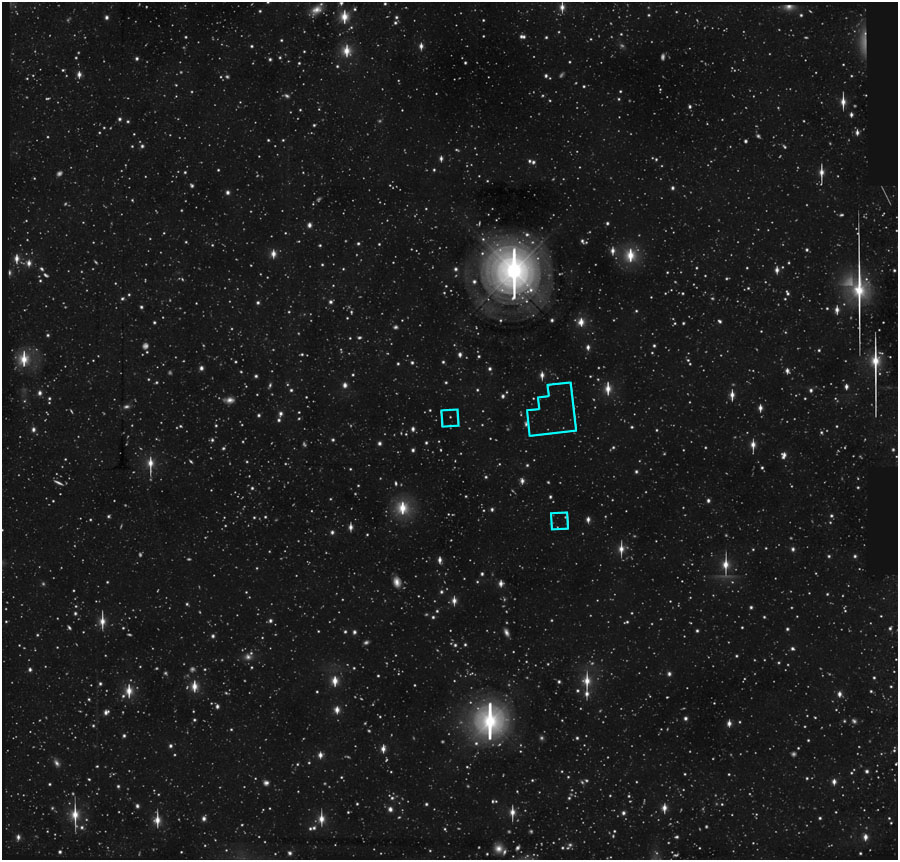

HDF-S on ground-based image

Deep ground-based image with location of HDF South.

Credit: J. Gardner (NOAO/GSFC), Cerro Tololo Inter- American Observatory.